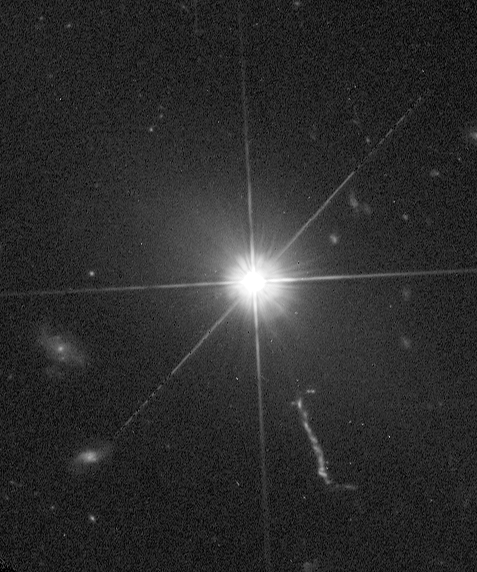

Quasar 3C 273

The Hubble Space Telescope's new Advanced Camera for Surveys (ACS) has provided the clearest view yet in visible light of the nearby quasar, 3C 273.

Credit: NASA/ESA and J. Bahcall (IAS)